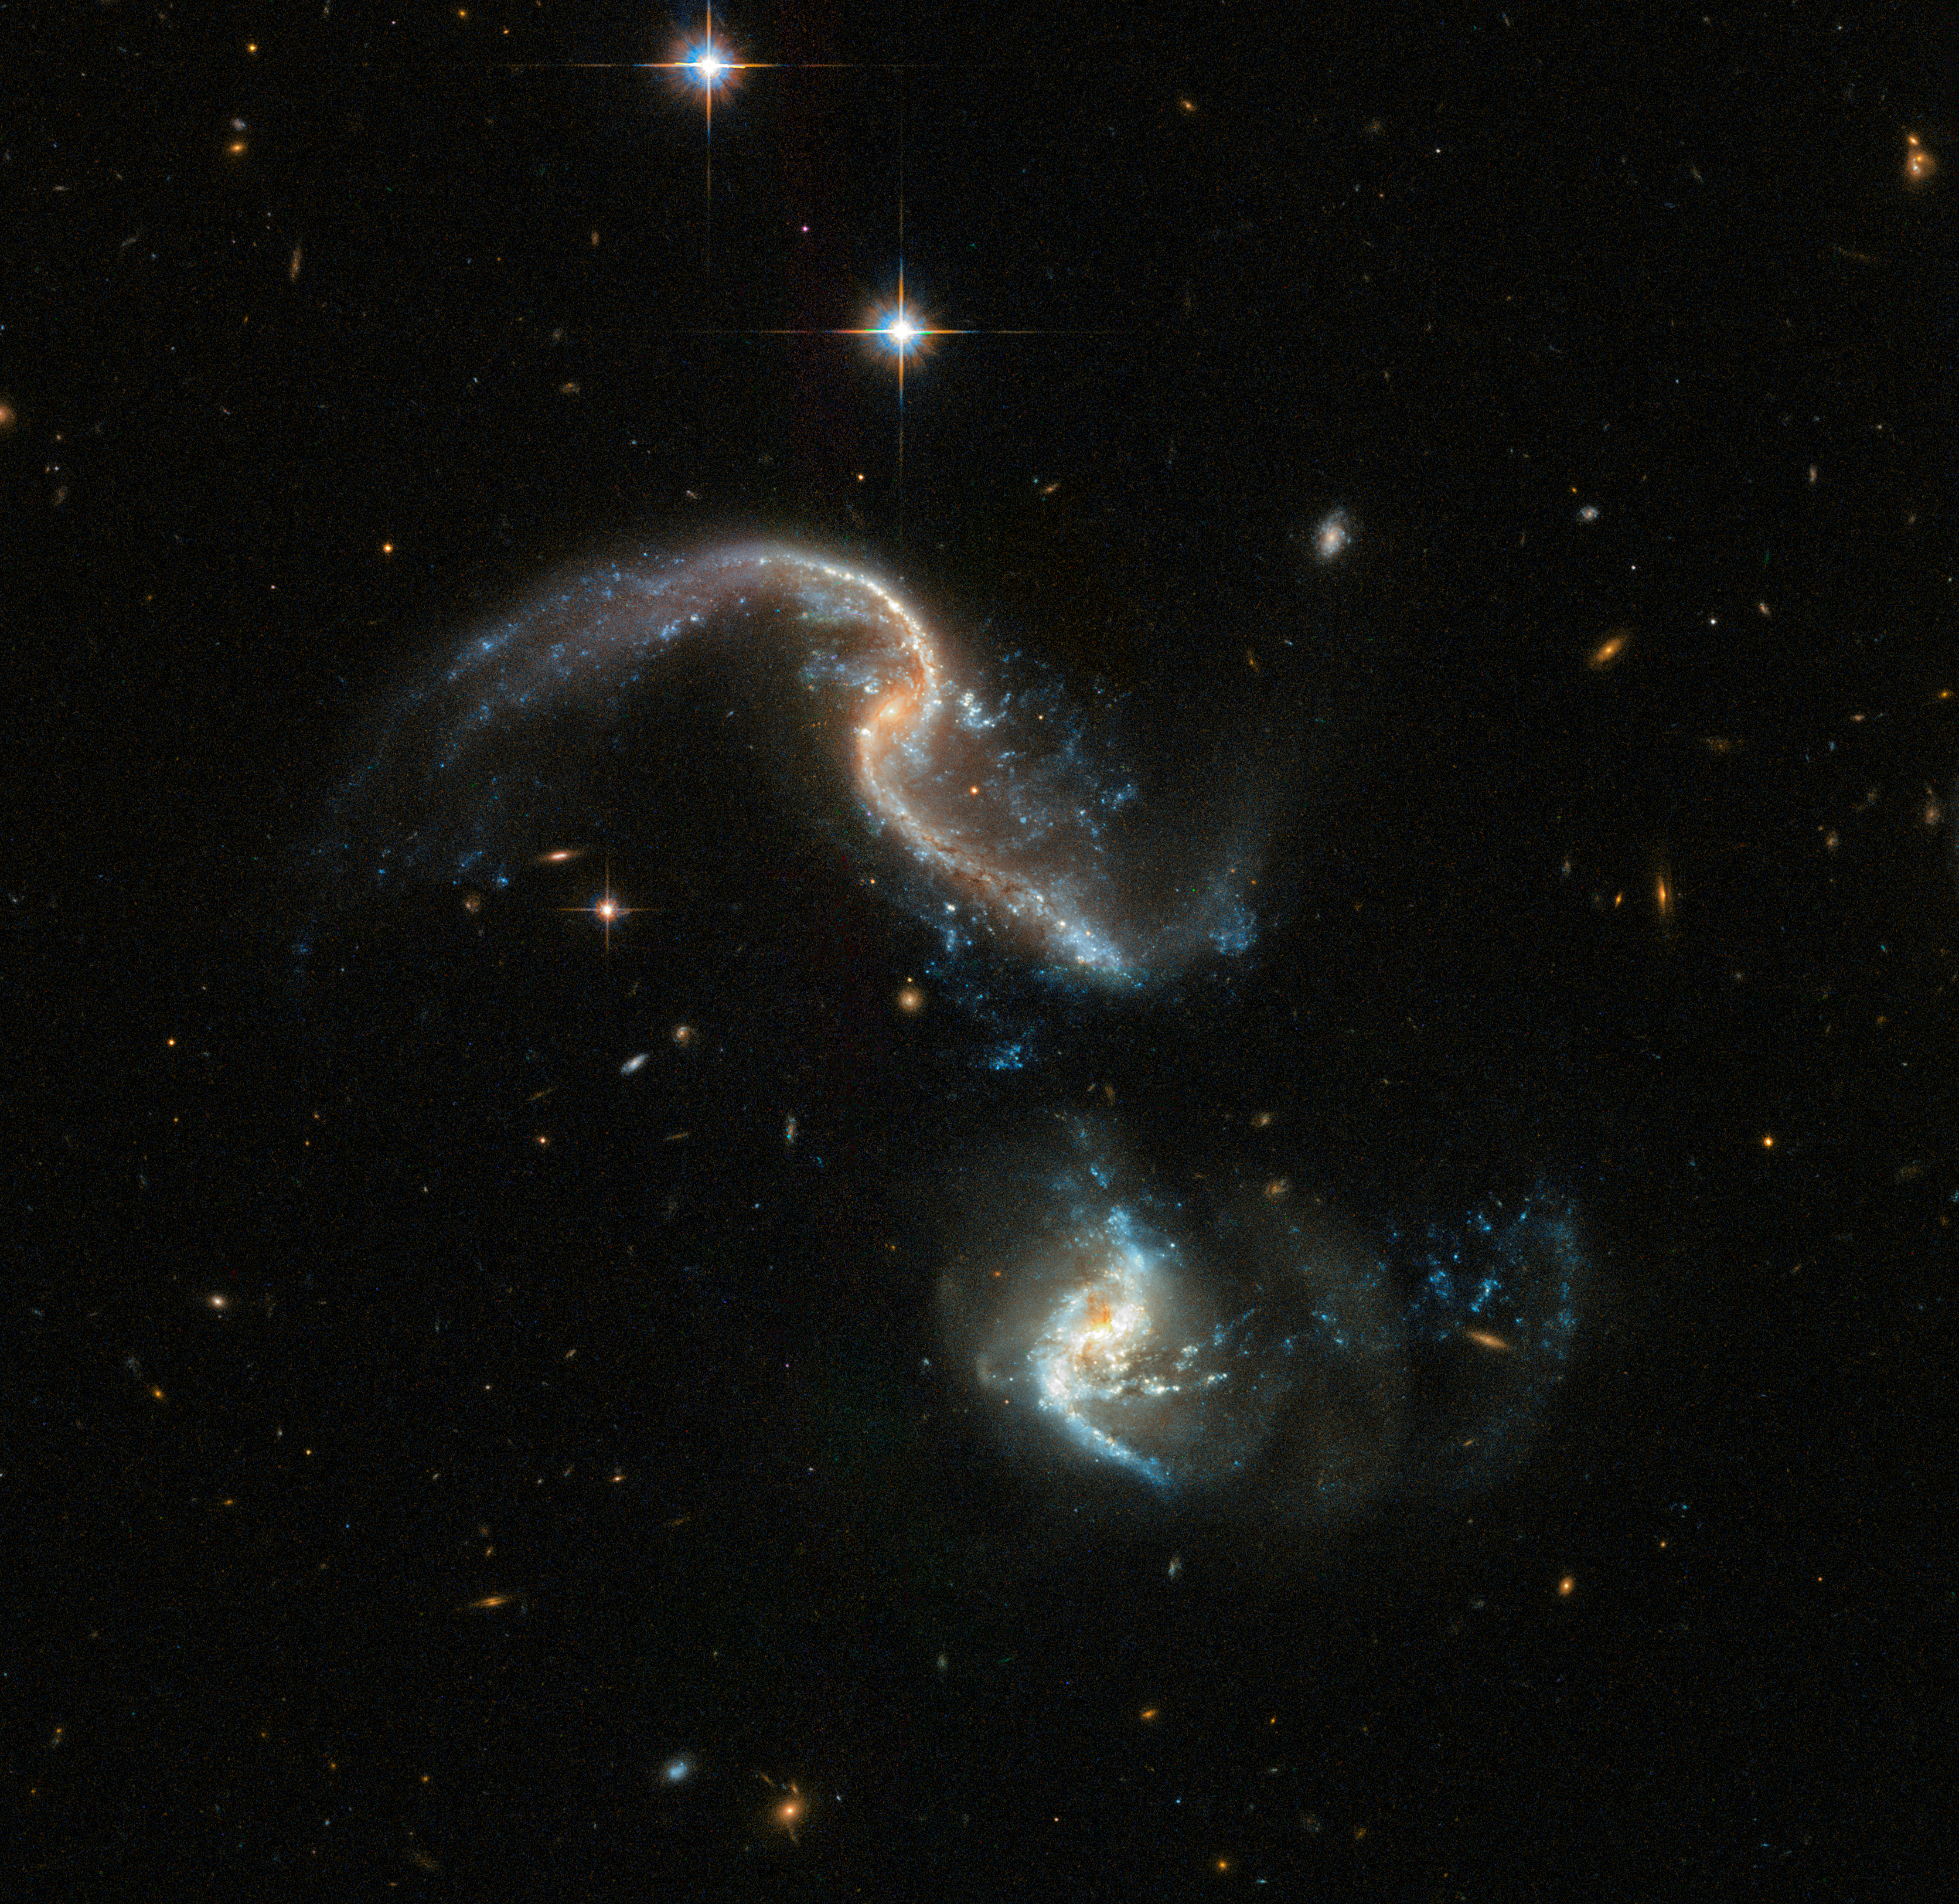

Crash in progress

Arp 256 is a stunning system of two spiral galaxies, about 350 million light-years away, in an early stage of merging. The image, taken with the NASA/ESA Hubble Space Telescope, displays two galaxies with strongly distorted shapes and an astonishing number of blue knots of star formation that look like exploding fireworks. The star formation was triggered by the close interaction between the two galaxies.

This image was taken by Hubble’s Advanced Camera for Surveys (ACS) and the Wide Field Camera 3 (WFC3). It is a new version of an image already released in 2008 that was part a large collection of 59 images of merging galaxies taken for Hubble’s 18th anniversary.

Credit: ESA/Hubble, NASA